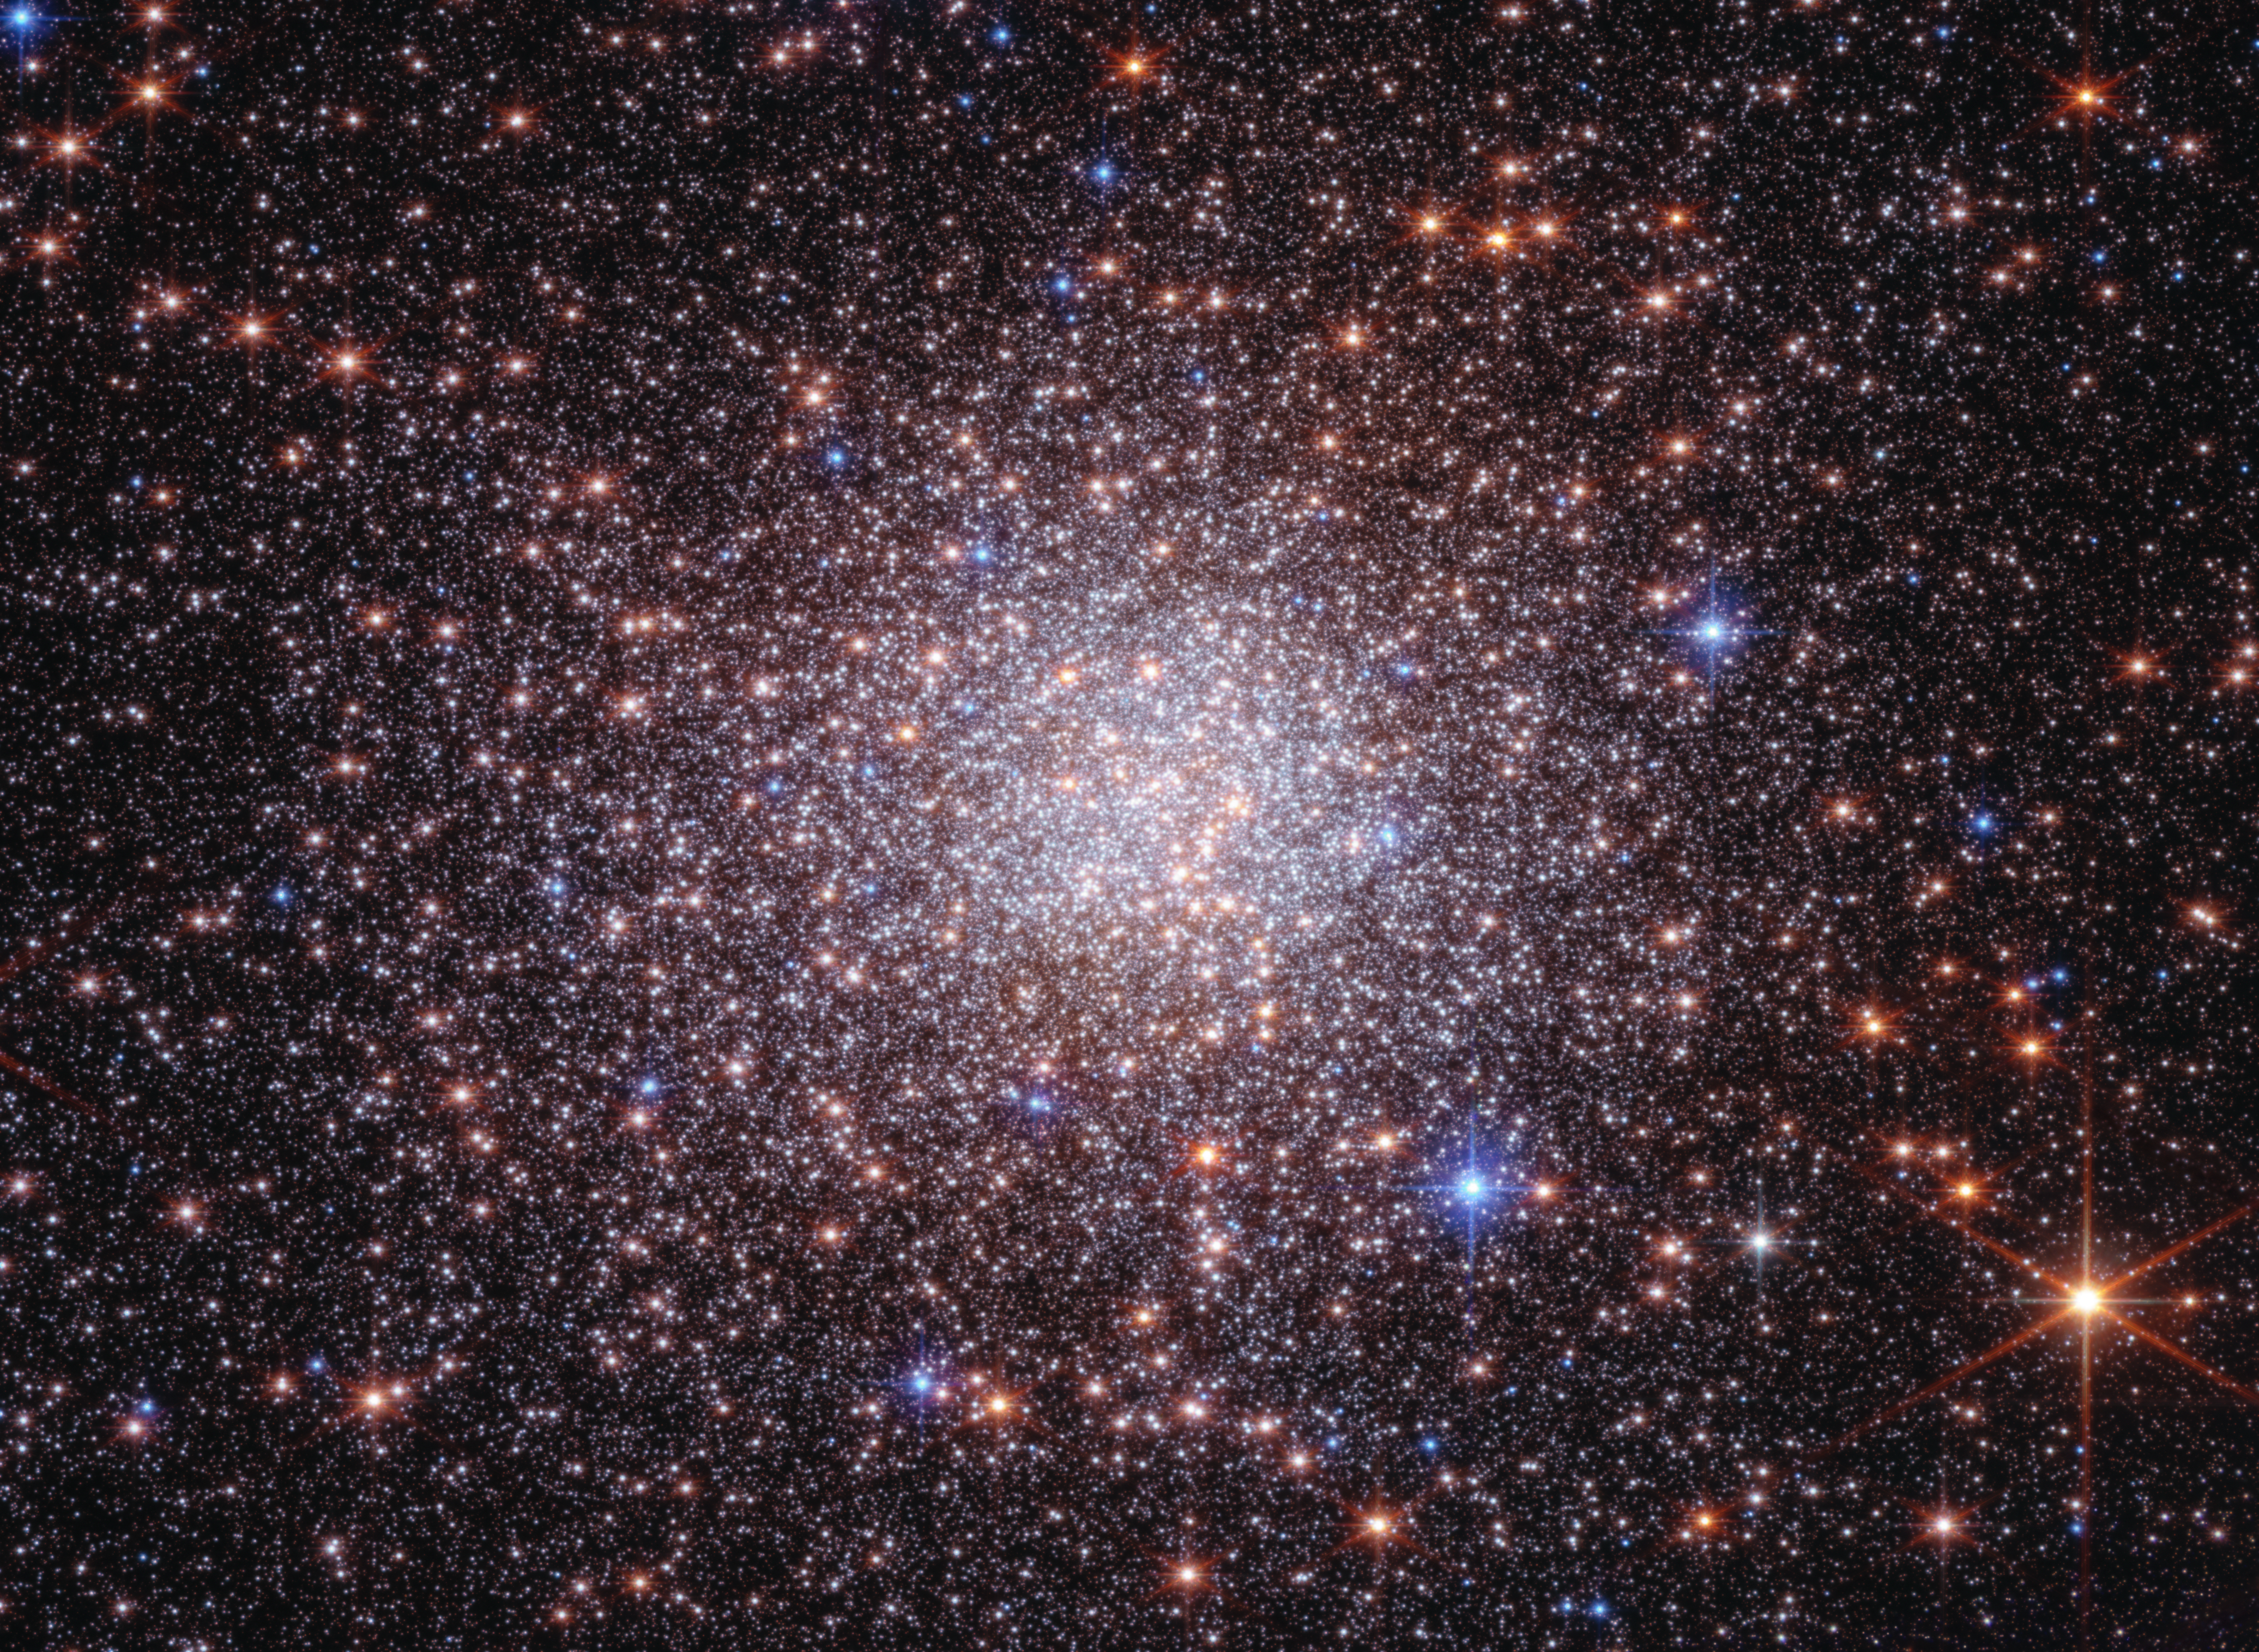

Bulge fossil fragment Terzan 5 (Webb and Hubble image)

Terzan 5 is a stellar system orbiting within the Milky Way galaxy’s bulge, which is an incredibly bright, crowded central region of the galaxy. Not only are stars within the bulge tightly packed together — every bit of this region is laced with thick clouds of gas and dust.

The James Webb and Hubble Space Telescopes joined forces to study Terzan 5. Astronomers already knew that this star cluster was unusual in that it contained two stellar populations of very different ages. New research found strong evidence for two more stellar populations, one that formed 3.8 billion years ago and another only 2.5 billion years ago. The research team also was able to determine the ages of the previously known stellar populations with unprecedented precision, finding that they formed 12.5 billion and 4.7 billion years ago.

This finding proved that Terzan 5 is not a globular star cluster, as originally classified. Instead, Terzan 5 belongs to a new category, known as a bulge fossil fragment — a self-contained, self-enriching stellar system with multiple star populations of different ages and with different iron abundances.

Terzan 5 is 22,000 light-years away in the constellation Sagittarius. It contains about 2 million times the Sun's mass packed into a stellar system only a few tens of light-years across, making it one of the most massive and densely populated globular-cluster-like systems in the Milky Way.

This image was created with Hubble data from proposal: 12933 (F. R. Ferraro) and Webb data from proposal: 5502 (F. R. Ferraro).

Credit: NASA, ESA, CSA, STScI, G. Zullo (University of Bologna), F. R. Ferraro (University of Bologna). Image Processing: A. Pagan (STScI)